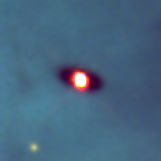

Protoplanetary disc in the Orion Nebula

Disks around young stars (also known as circumstellar or protoplanetary disks) are thought to be made up of 99% gas and 1% dust. Even that small amount of dust is enough to make the disks opaque and dark at visible wavelengths. The dark disk is seen in this image because they are silhouetted against the bright backdrop of the hot gas of the Orion nebula.

Credit: Mark McCaughrean (Max-Planck-Institute for Astronomy), C. Robert O'Dell (Rice University), and NASA/ESA